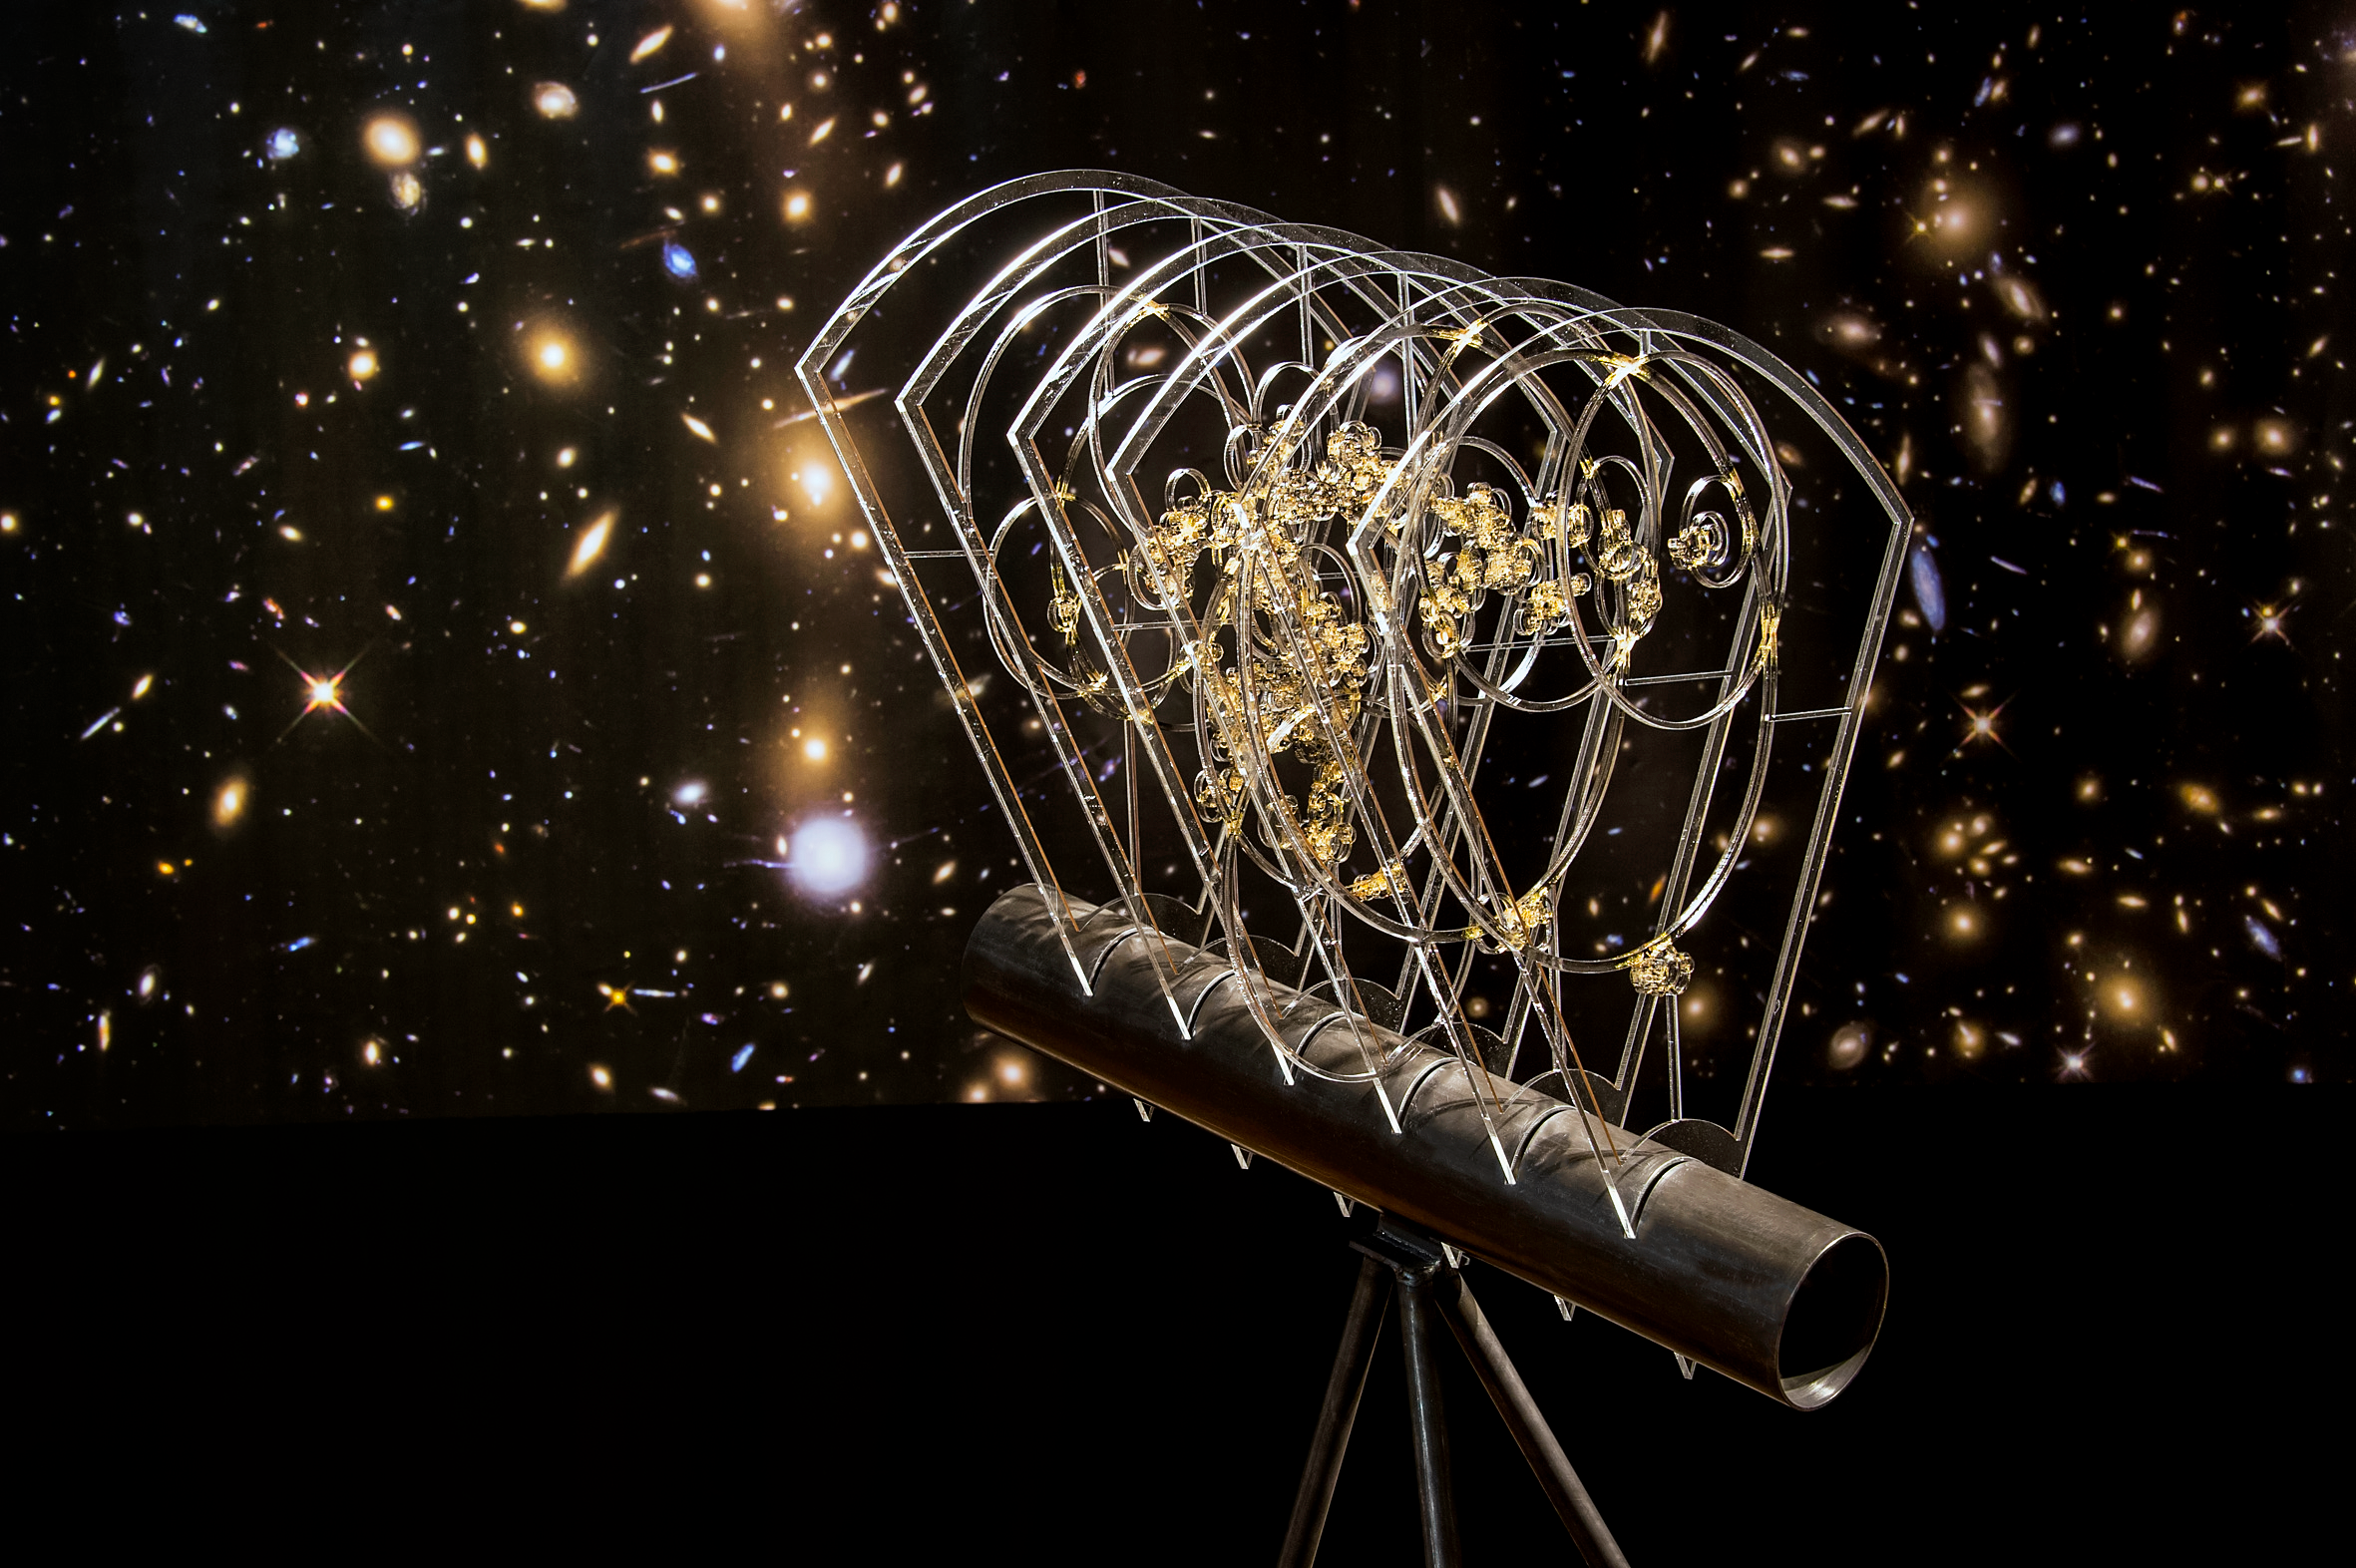

Our Place in Space — The Great Wall

On the largest scales galaxies in the Universe are distributed in arcs and filaments, creating a net-like structure. For her work The Great Wall, the artist Monica LoCascio was inspired by the idea of this cosmic web — the representation of large-scale structures in the Universe as a network. The installation explores how structures form in space and is based on astronomical data from the BOSS (Baryon Oscillation Spectroscopic Survey) Great Wall, a complex of several galaxy clusters about 5 billion light-years from Earth. The work allows a subjective view of connections and distances: Although the shining galaxies are separated by unimaginable distances, they are held together by dark matter. This allows us to follow the growth of the largest structures in our Universe.

This installation was created for the Hubble travelling exhibition Our Place in Space in Vienna.

Credit: NHM Wien, Kurt Kracher